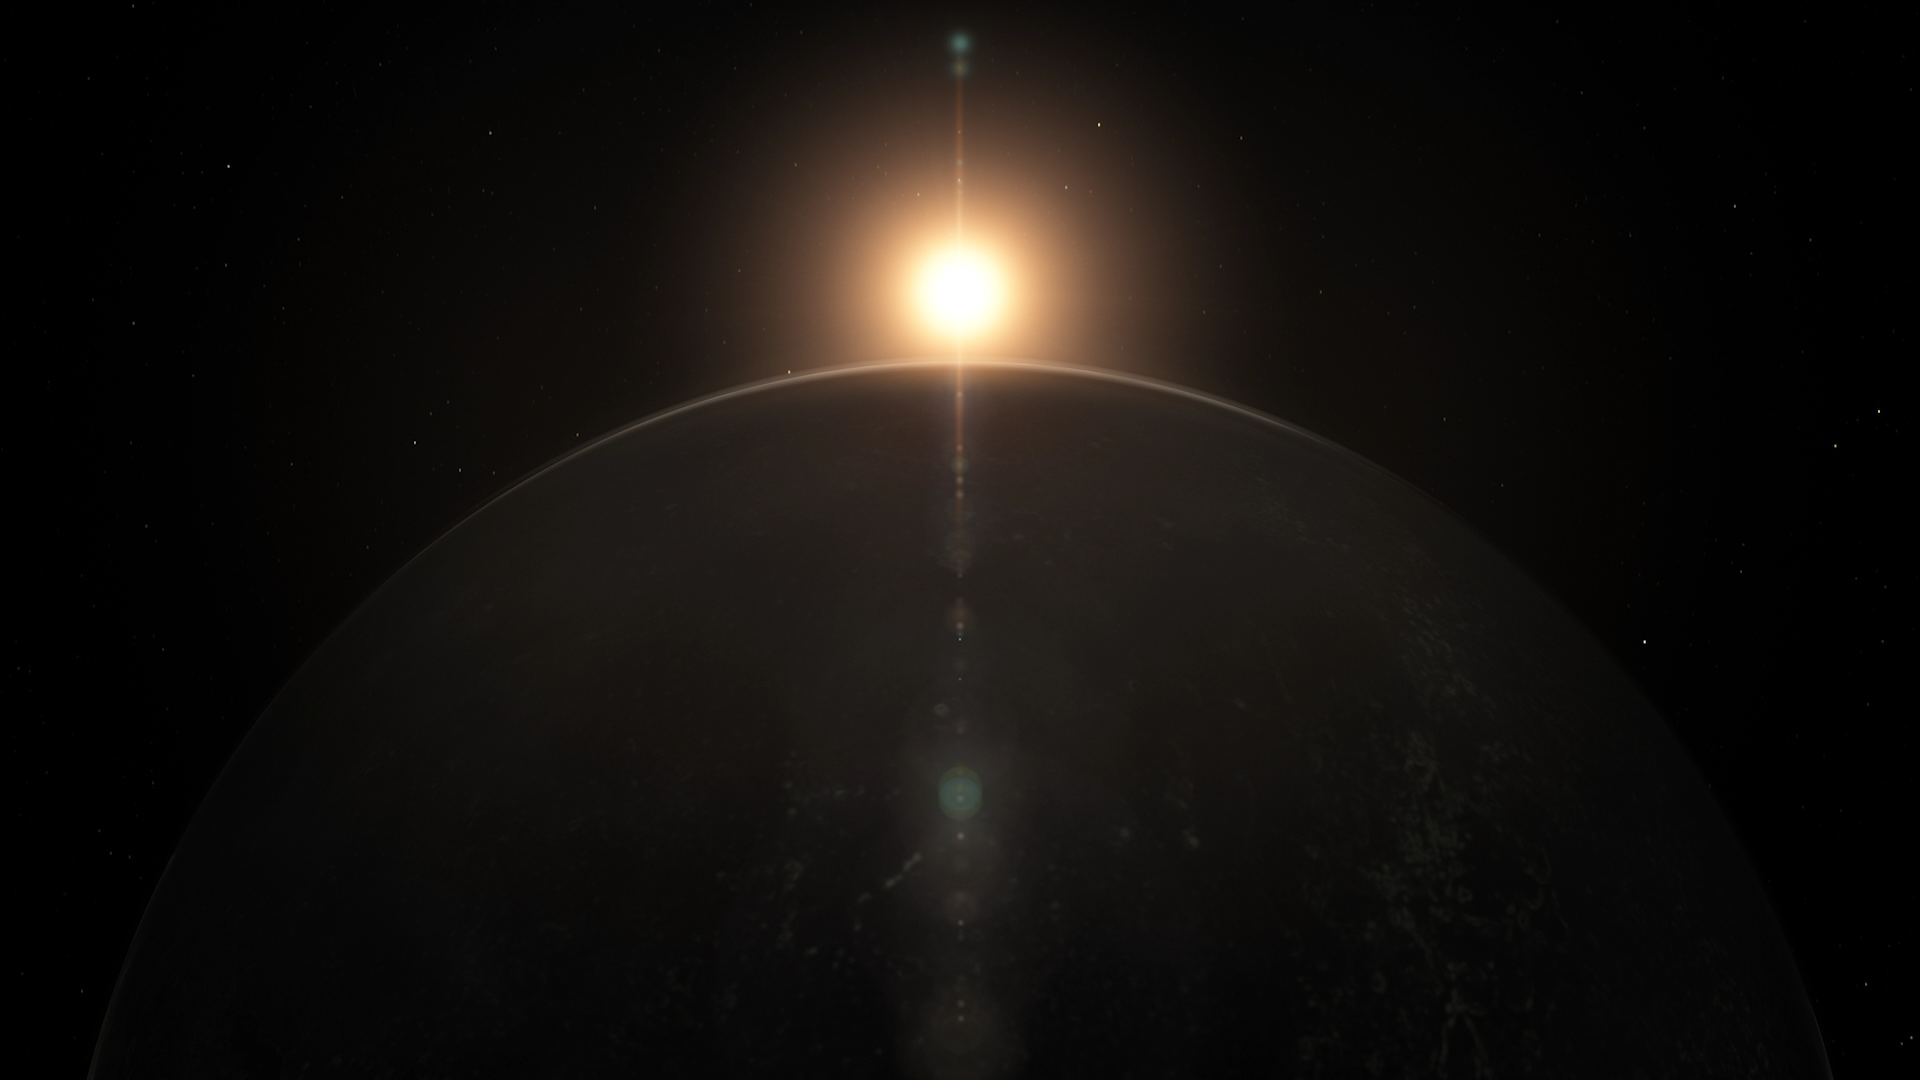

Screenshot of Hubblecast 121

Screenshot of Hubblecast 121: What can we learn from exoplanet transits?

Credit: NASA & ESA